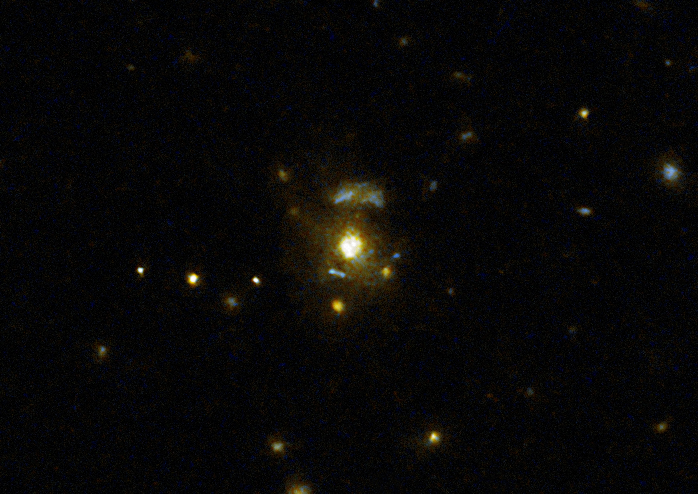

Radio galaxy 3C 297

This image taken with the NASA/ESA Hubble Space Telescope shows the galaxy 3C 297, which was part of a large survey of galaxies.

The survey confirmed the link between mergers and galaxies hosting relativistic jets from supermassive black holes. These galaxies have very strong emissions at radio wavelengths implying that the supermassive black holes they host are feeding huge outflows of plasma.

Credit: NASA, ESA, M. Chiaberge (STScI)